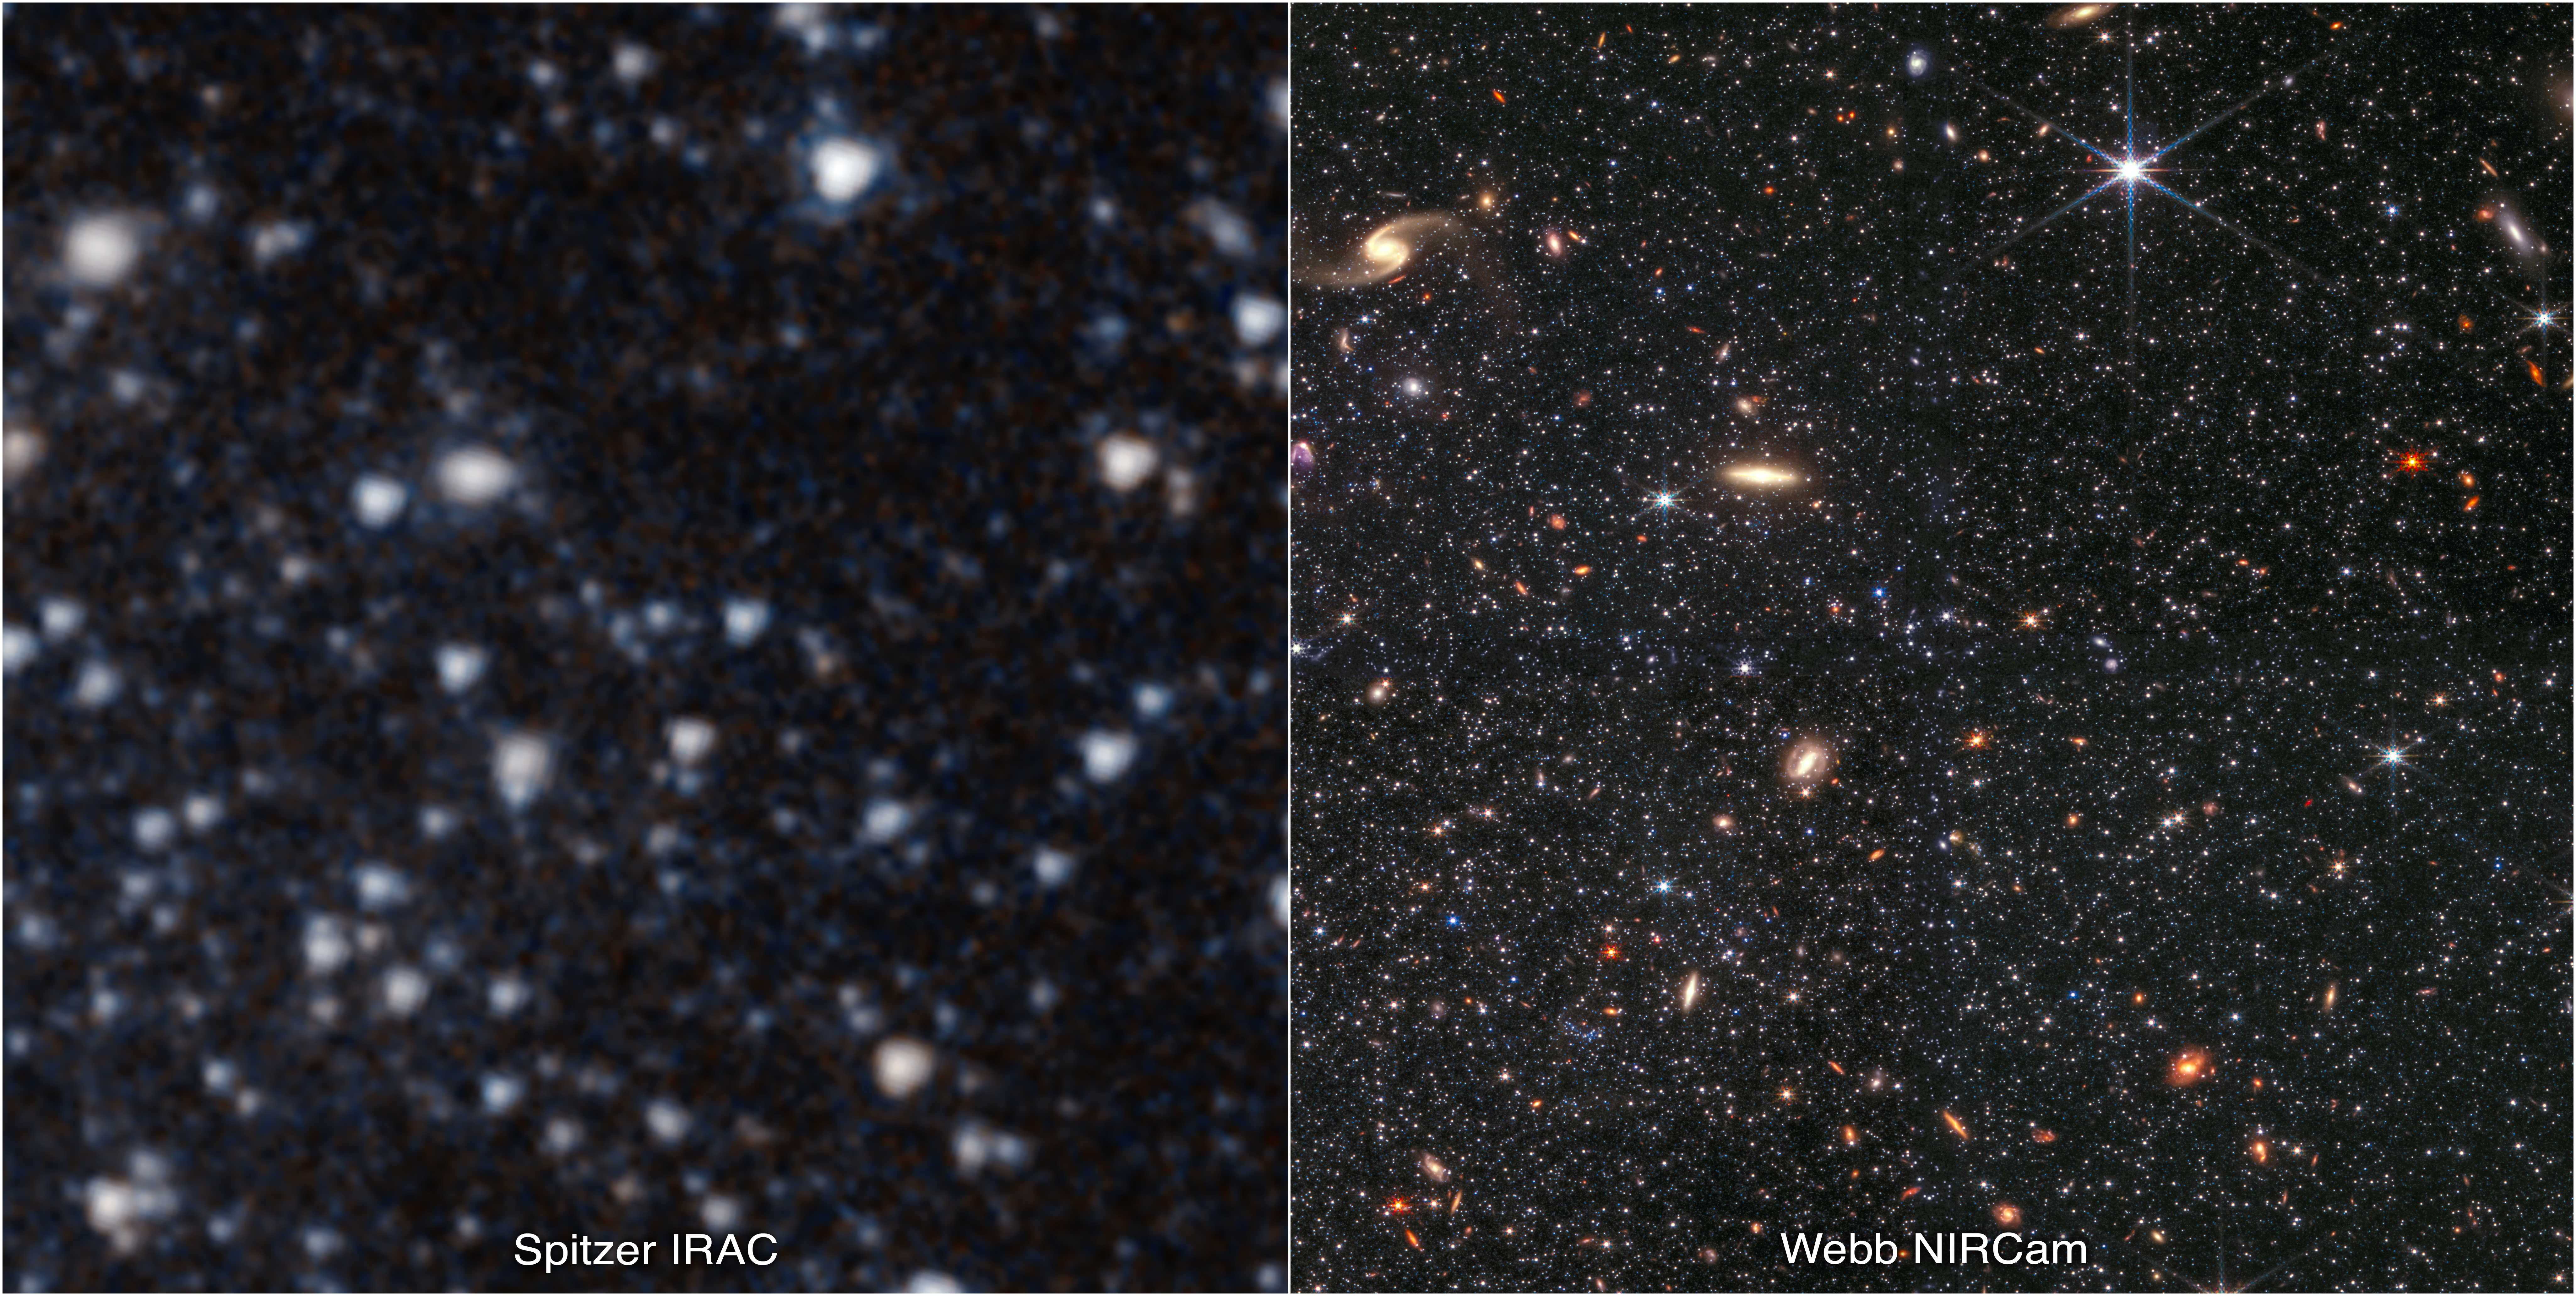

Dwarf Galaxy WLM: Spitzer and Webb

This image shows a portion of the dwarf galaxy Wolf–Lundmark–Melotte (WLM) captured by NASA’s Spitzer Space Telescope’s Infrared Array Camera (left) and the NASA/ESA/CSA James Webb Space Telescope’s Near-Infrared Camera (right). The images demonstrate Webb’s remarkable ability to resolve faint stars outside the Milky Way. The galaxy lies roughly 3 million light-years away.

This observation was taken as part of Webb’s Early Release Science (ERS) program 1334, focused on resolved stellar populations. The dwarf galaxy WLM was selected for this program as its gas is similar to that which made up galaxies in the early Universe and it is relatively nearby, meaning that Webb can differentiate between its individual stars. The gas in WLM is fairly unriched, chemically speaking, meaning that it is poor in elements heavier than hydrogen and helium. Learn more about Webb’s research of the dwarf galaxy WLM here.

The Spitzer image shows 3.6-micron light in cyan and 4.5-micron in orange (IRAC1 and IRAC2). The Webb image includes 0.9-micron light shown in blue, 1.5-micron in cyan, 2.5-micron in yellow, and 4.3-micron in red (filters F090W, F150W, F250M, and F430M).

Note: This image highlights Webb’s science in progress, which has not yet been through the peer-review process.

Credit: NASA, ESA, CSA, STScI, and K. McQuinn (Rutgers University), A. Pagan (STScI)